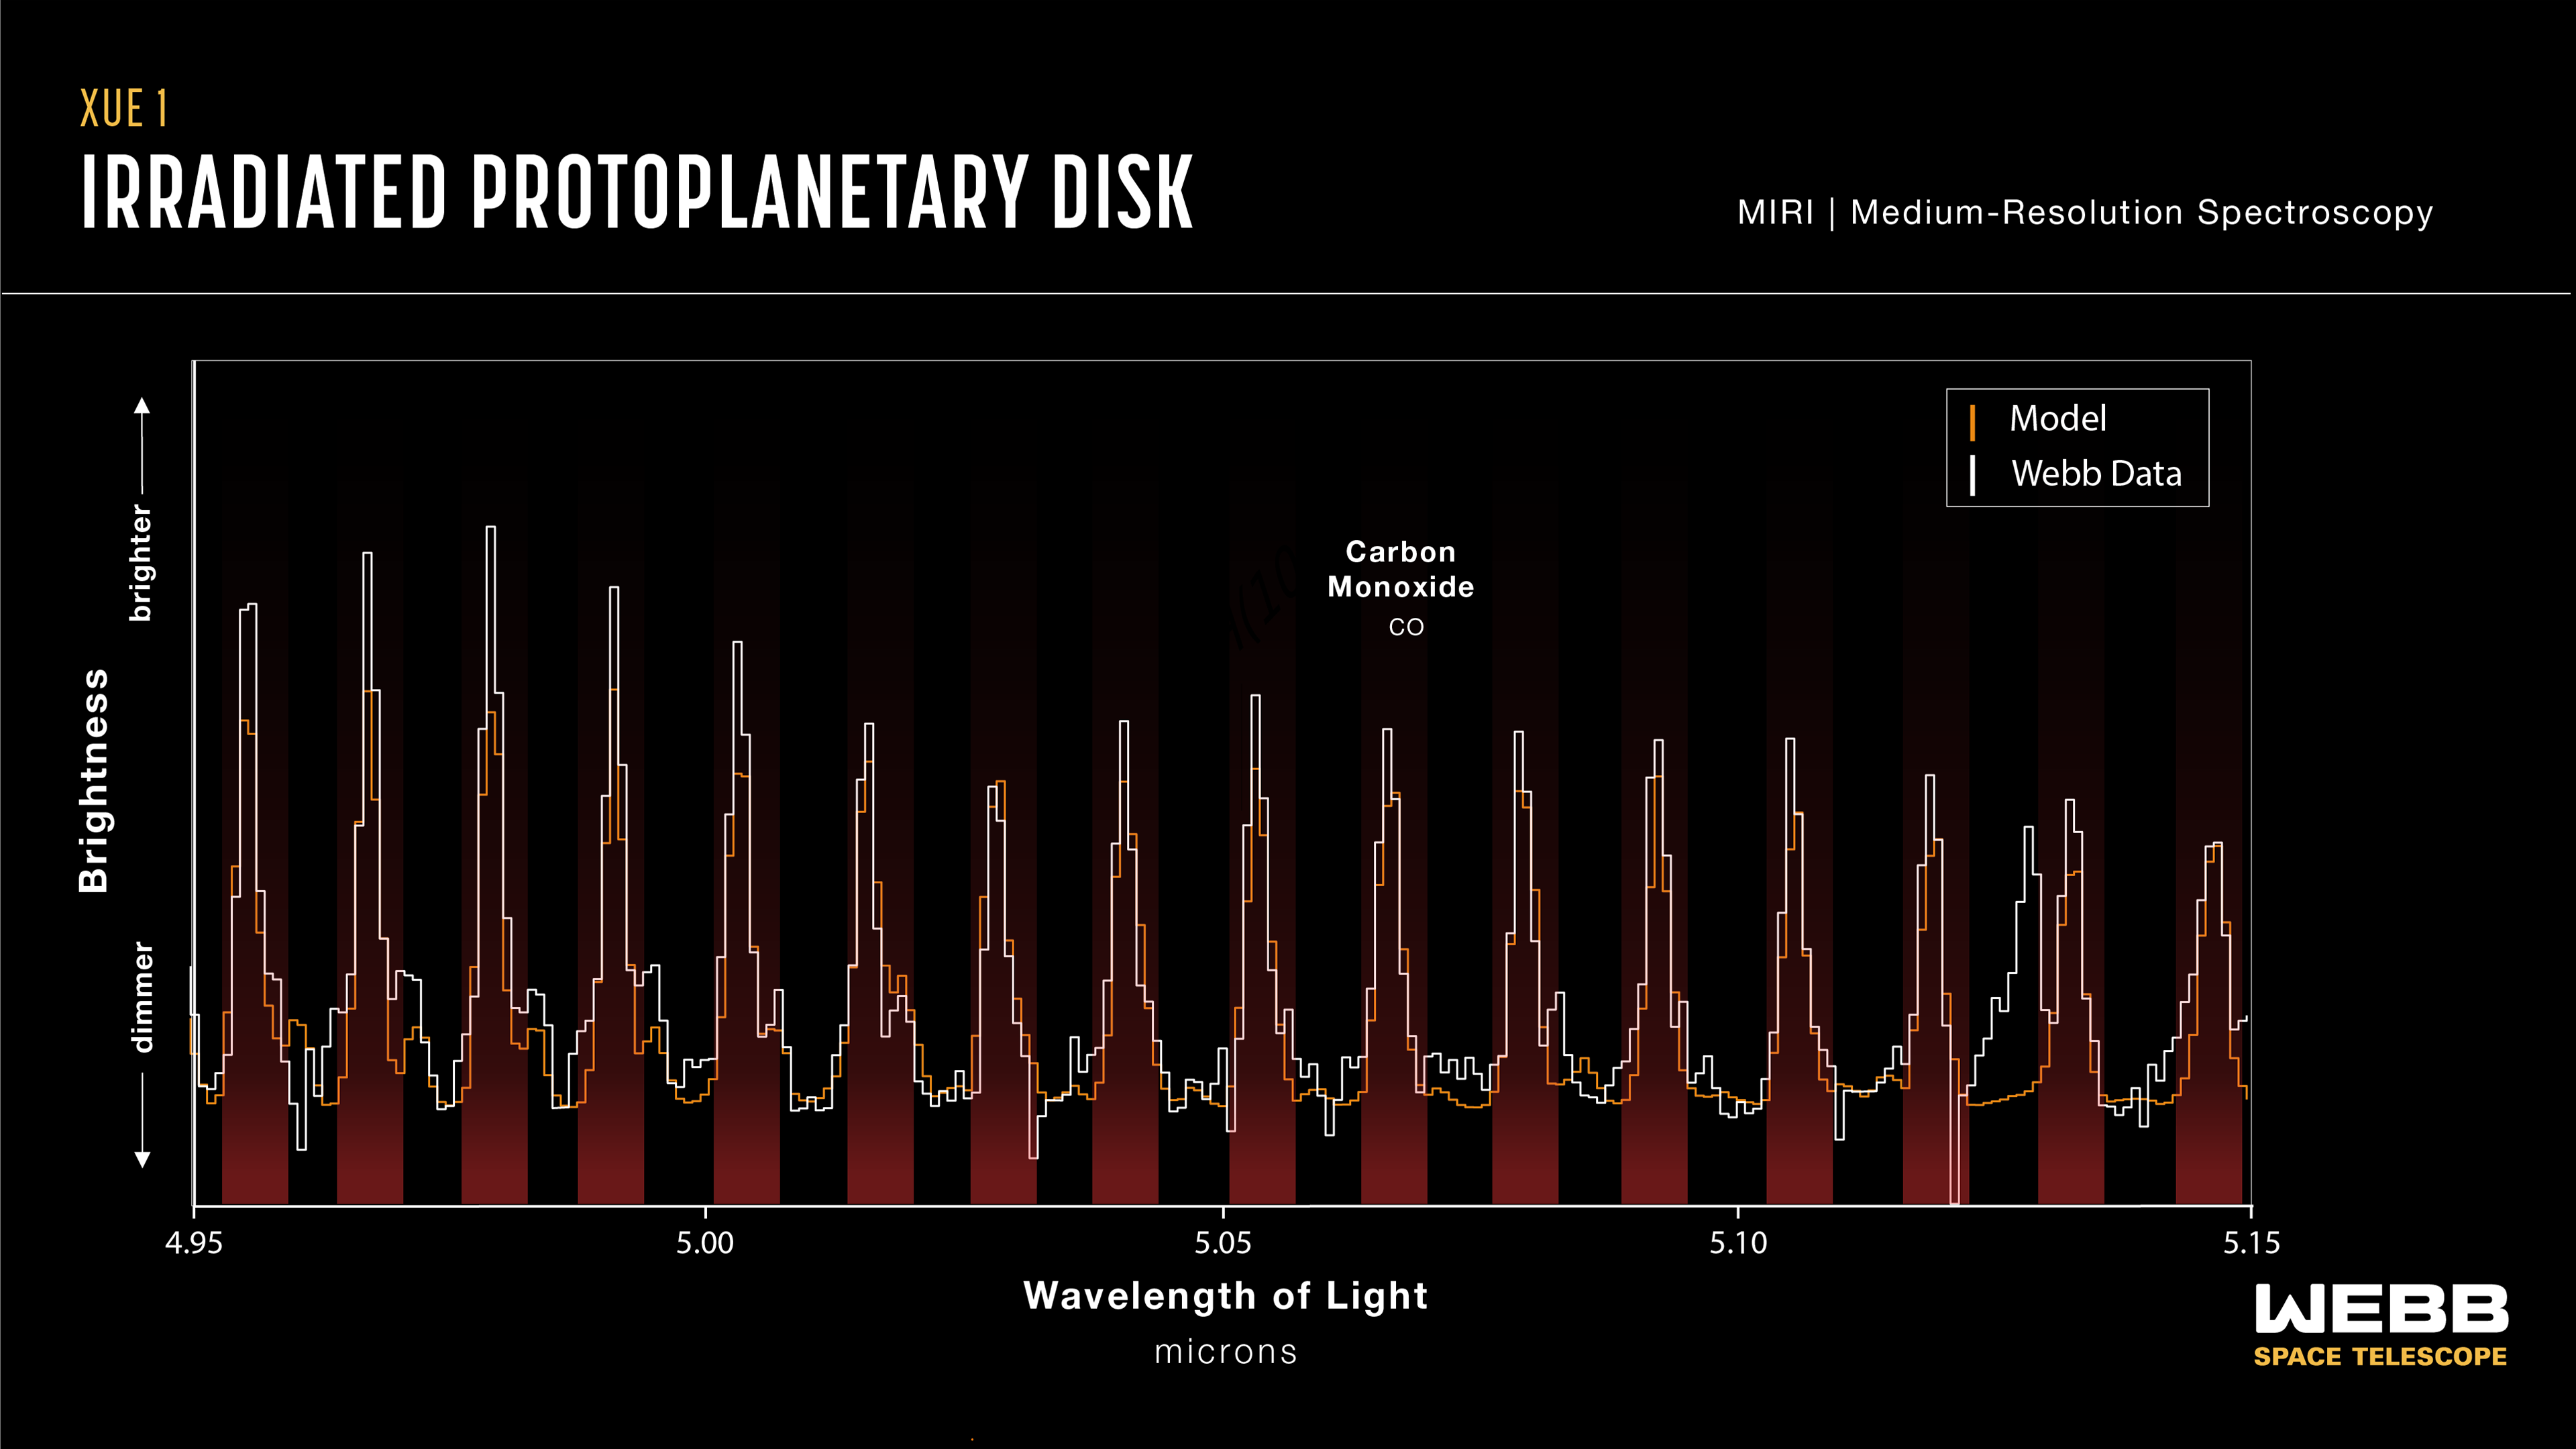

Protoplanetary disc XUE 1 (MIRI emission spectrum: 4.95–5.15 microns)

This graphic presents some of the first results from the eXtreme UV Environments (XUE) James Webb Space Telescope programme. These results suggest that the conditions for rocky-planet formation, typically found in the discs of low-mass star-forming regions, can also occur in massive-star-forming regions and possibly a broader range of environments.

Astronomers focussed on rocky-planet-forming regions of discs in the Lobster Nebula using Webb’s Medium Resolution Spectrometer (MRS) of the Mid-InfraRed Instrument (MIRI). This first result focuses on the protoplanetary disc termed XUE 1, which is located in the star cluster Pismis 24.

This graphic features the observed signatures of carbon monoxide spanning 4.95 to 5.15 microns

Credit: NASA, ESA, CSA, STScI, J. Olmsted (STScI), M. C Ramírez-Tannus (Max Planck Institute for Astronomy)